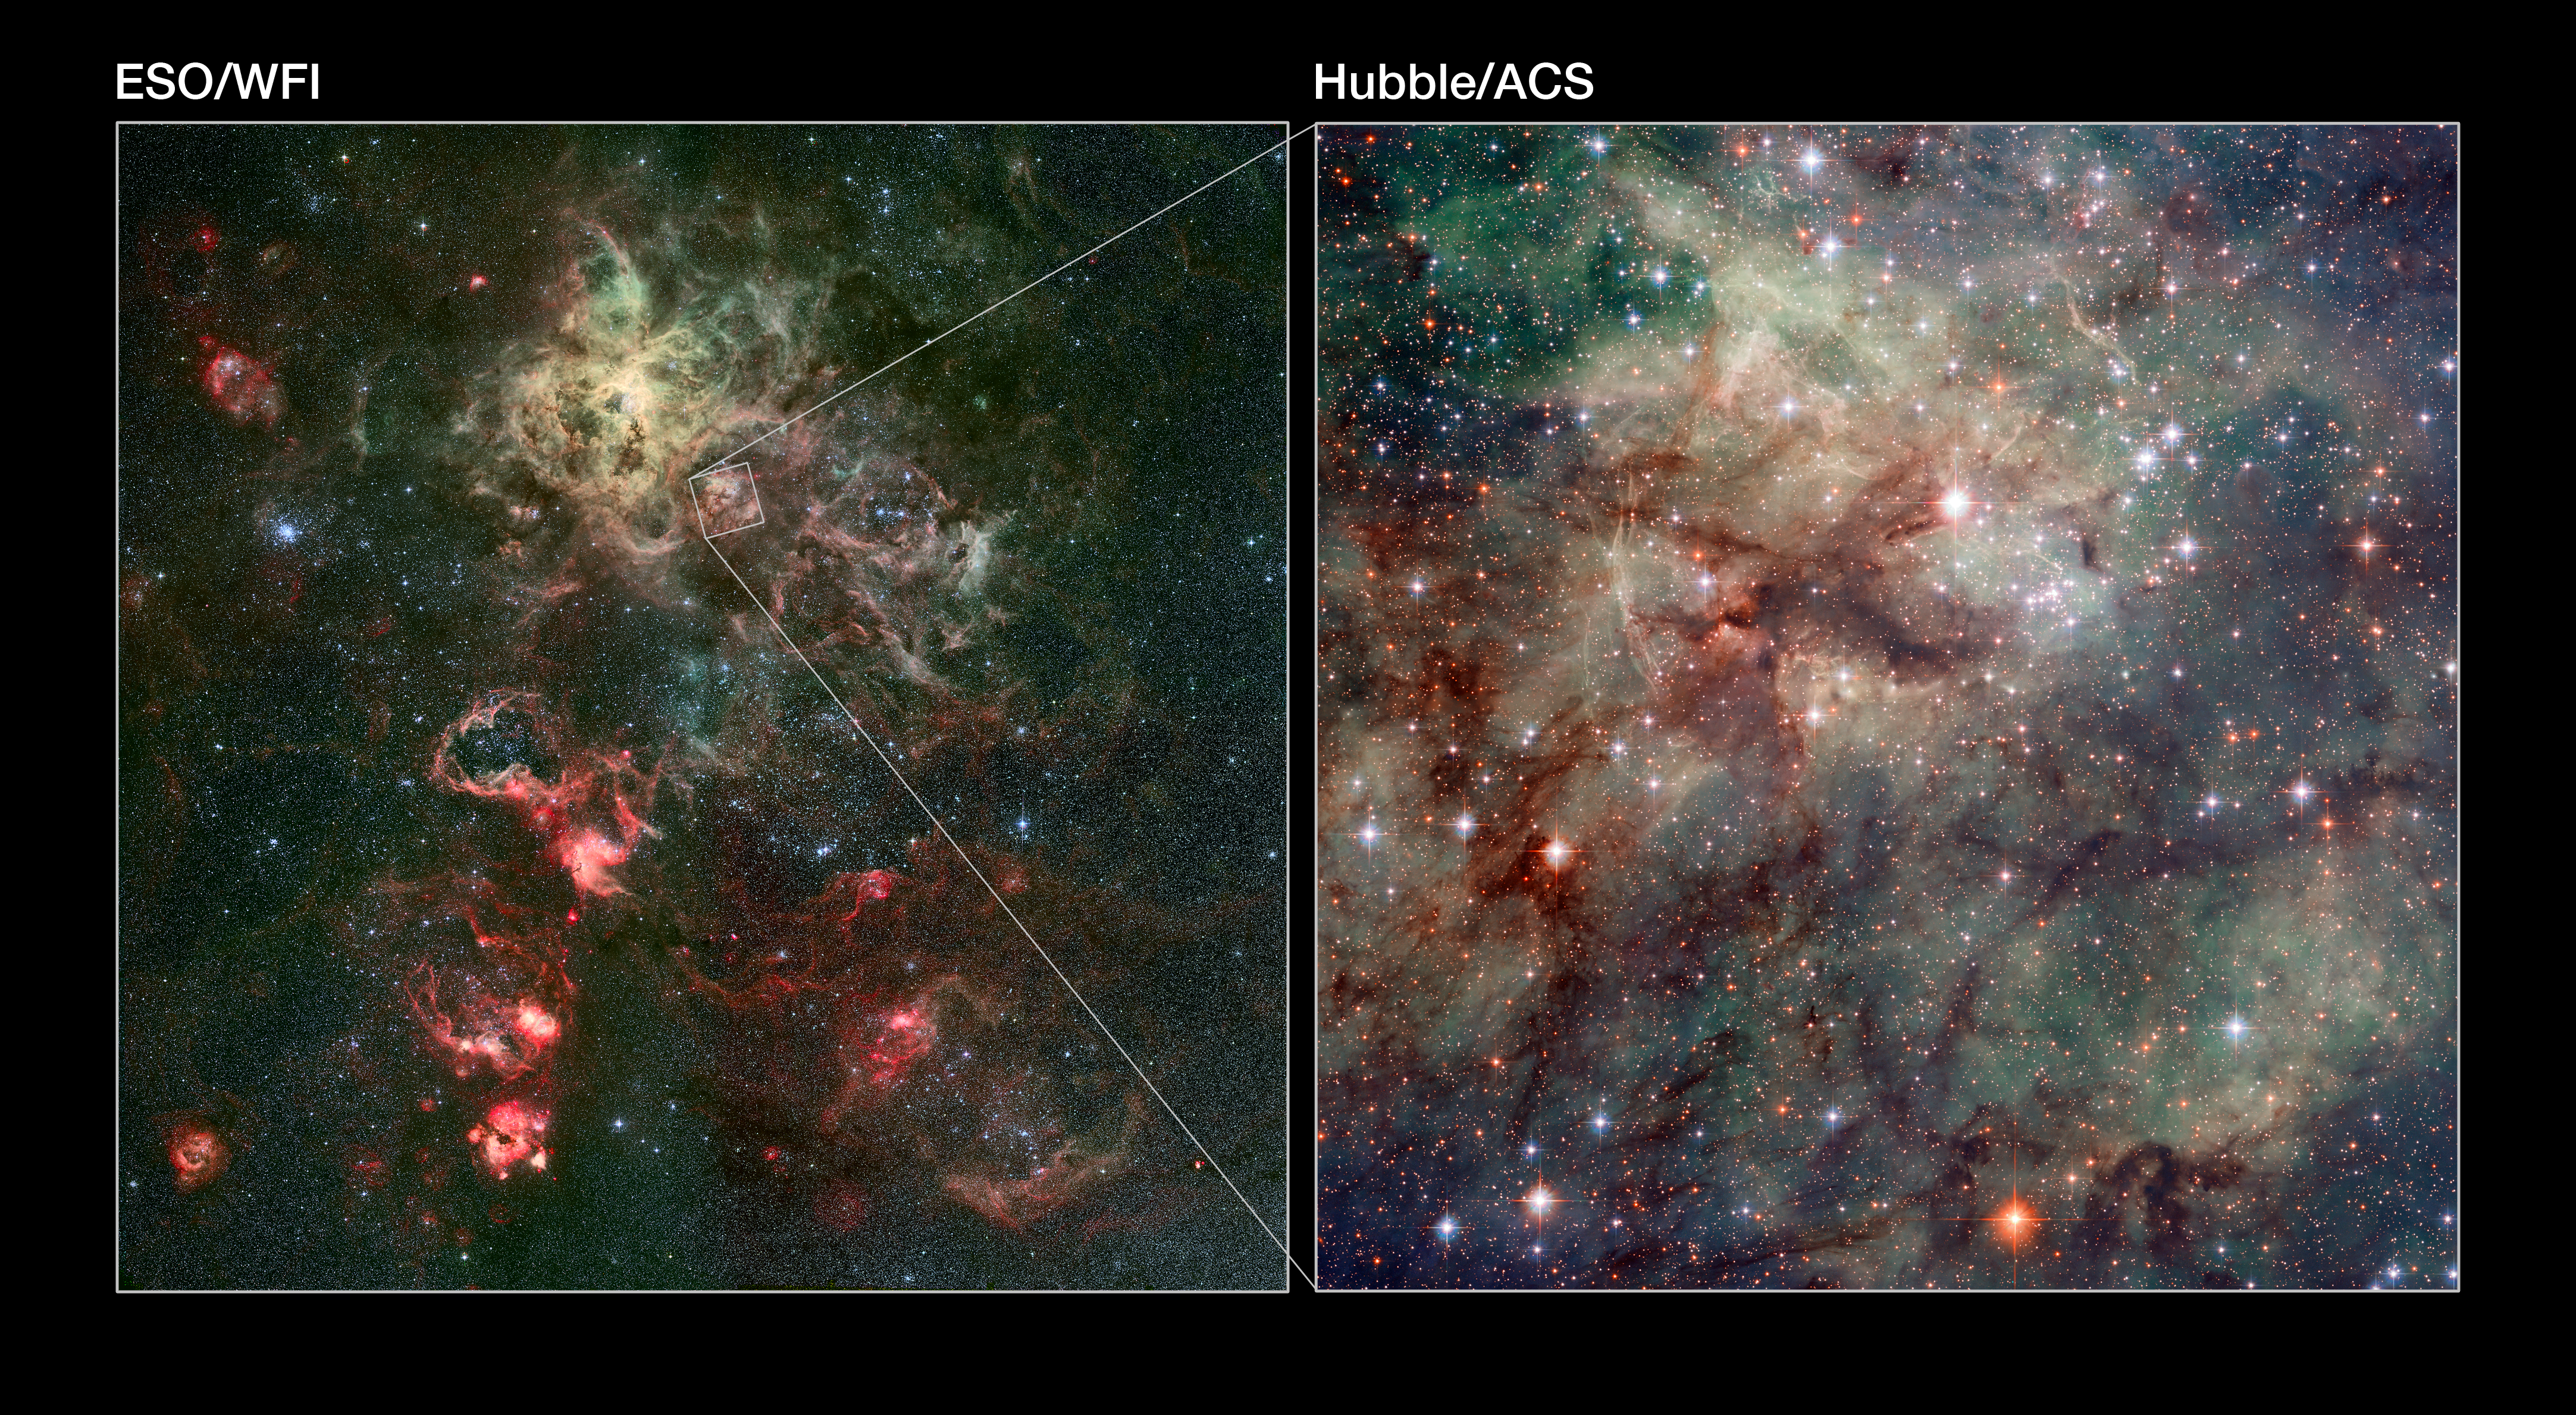

Wide-field and close-up views of the Tarantula Nebula

This image shows, on the left, a wide-field view of the Tarantula Nebula, a vast stellar nursery in the Large Magellanic Cloud. This was taken with the Wide Field Imager (WFI) on the MPG/ESO 2.2-metre telescope at the European Southern Observatory’s site at La Silla, Chile. On the right is a narrower, more detailed view of part of the nebula, observed by Hubble’s Advanced Camera for Surveys. The location of the Hubble image is marked by a square near the centre of the WFI image.

Credit: NASA, ESA, ESO